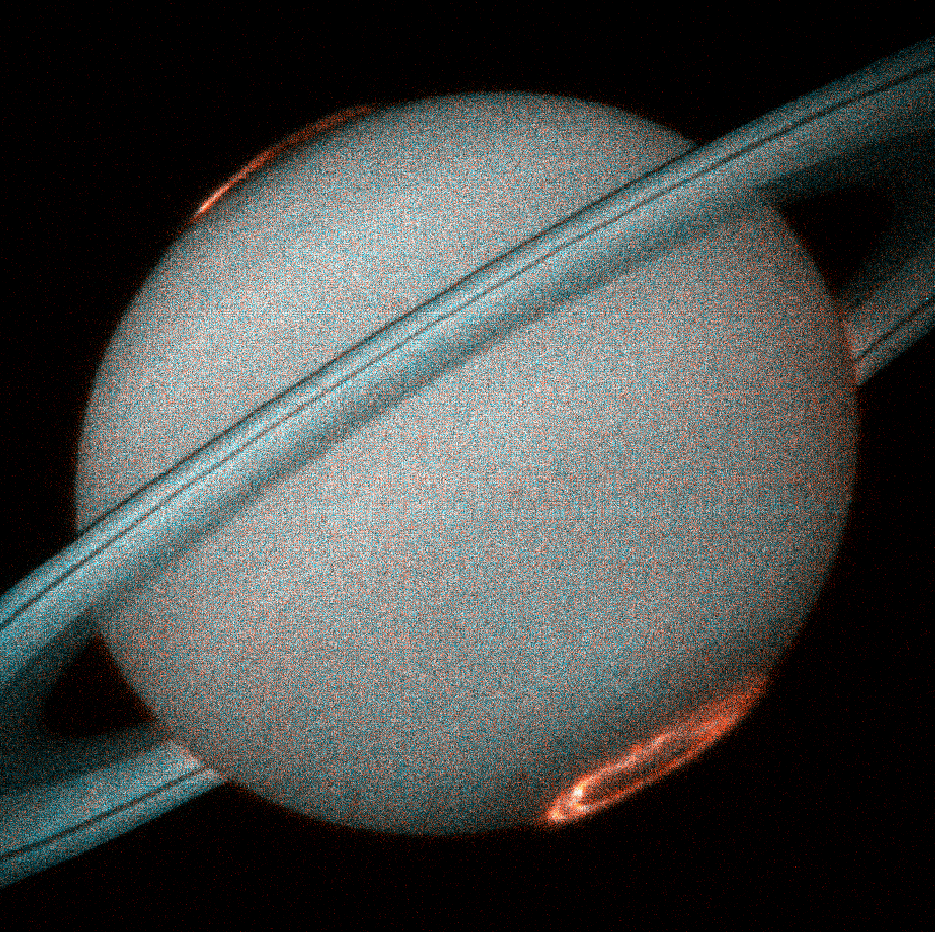

Hubble provides clear images of Saturn's aurora

This is the first image of Saturn's ultraviolet aurora taken by the Space Telescope Imaging Spectrograph (STIS) on board the Hubble Space Telescope in October 1997, when Saturn was a distance of 810 million miles (1.3 billion kilometers) from Earth. The new instrument, used as a camera, provides more than ten times the sensitivity of previous Hubble instruments in the ultraviolet. STIS images reveal exquisite detail never before seen in the spectacular auroral curtains of light that encircle Saturn’s north and south poles and rise more than a thousand miles above the cloud tops.

Credit: J.T. Trauger (Jet Propulsion Laboratory) and NASA/ESA